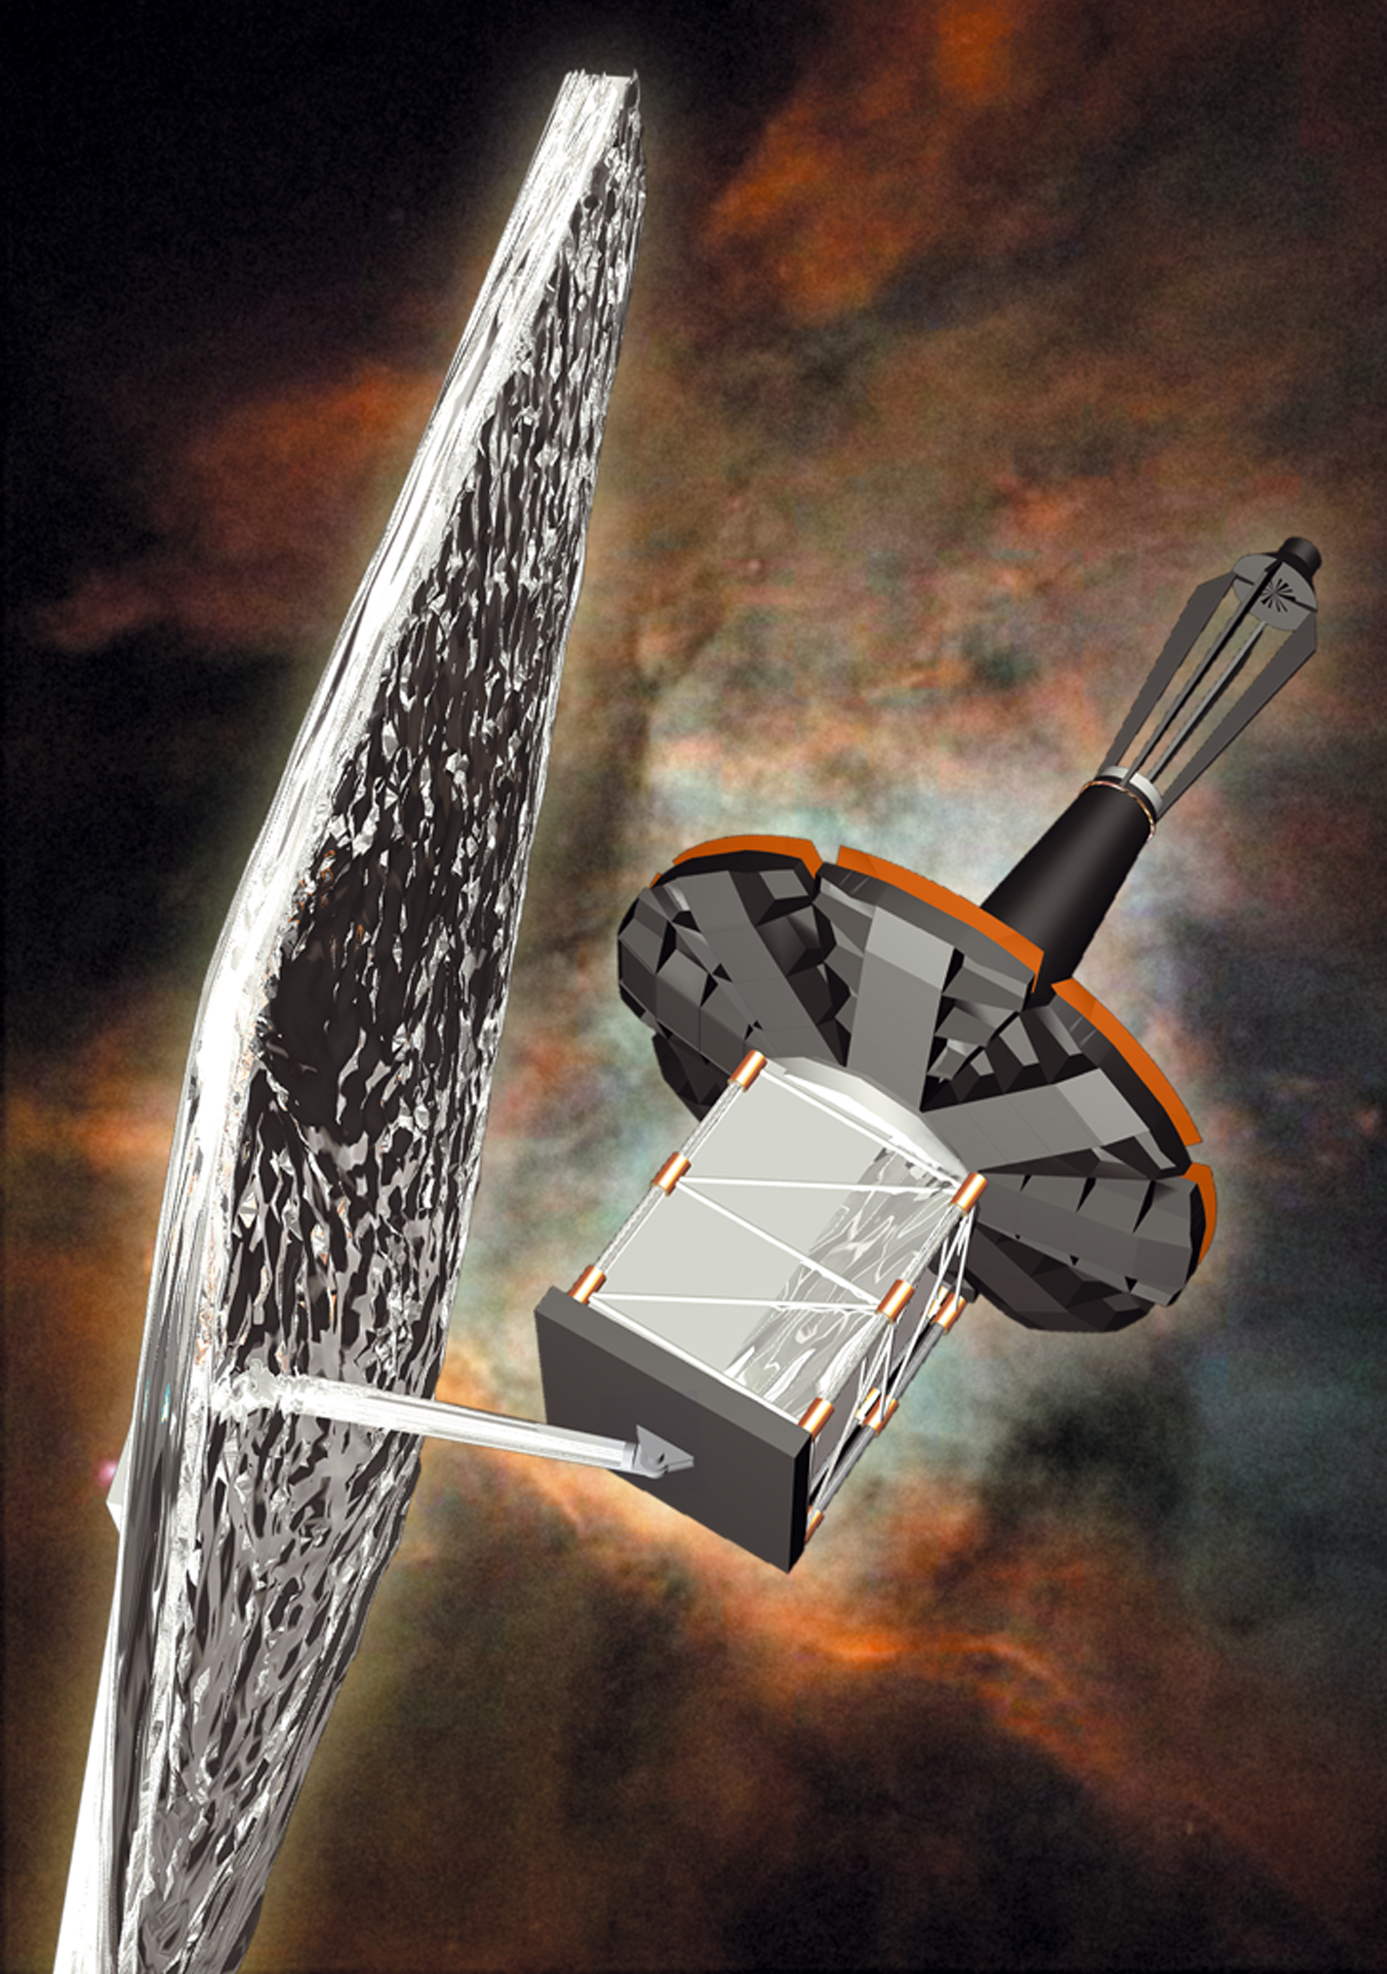

The James Webb Space Telescope (artist's impression)

Artist's impression of James Webb Space Telescope, peering into a far away nebula.

Credit: Lockheed-Martin